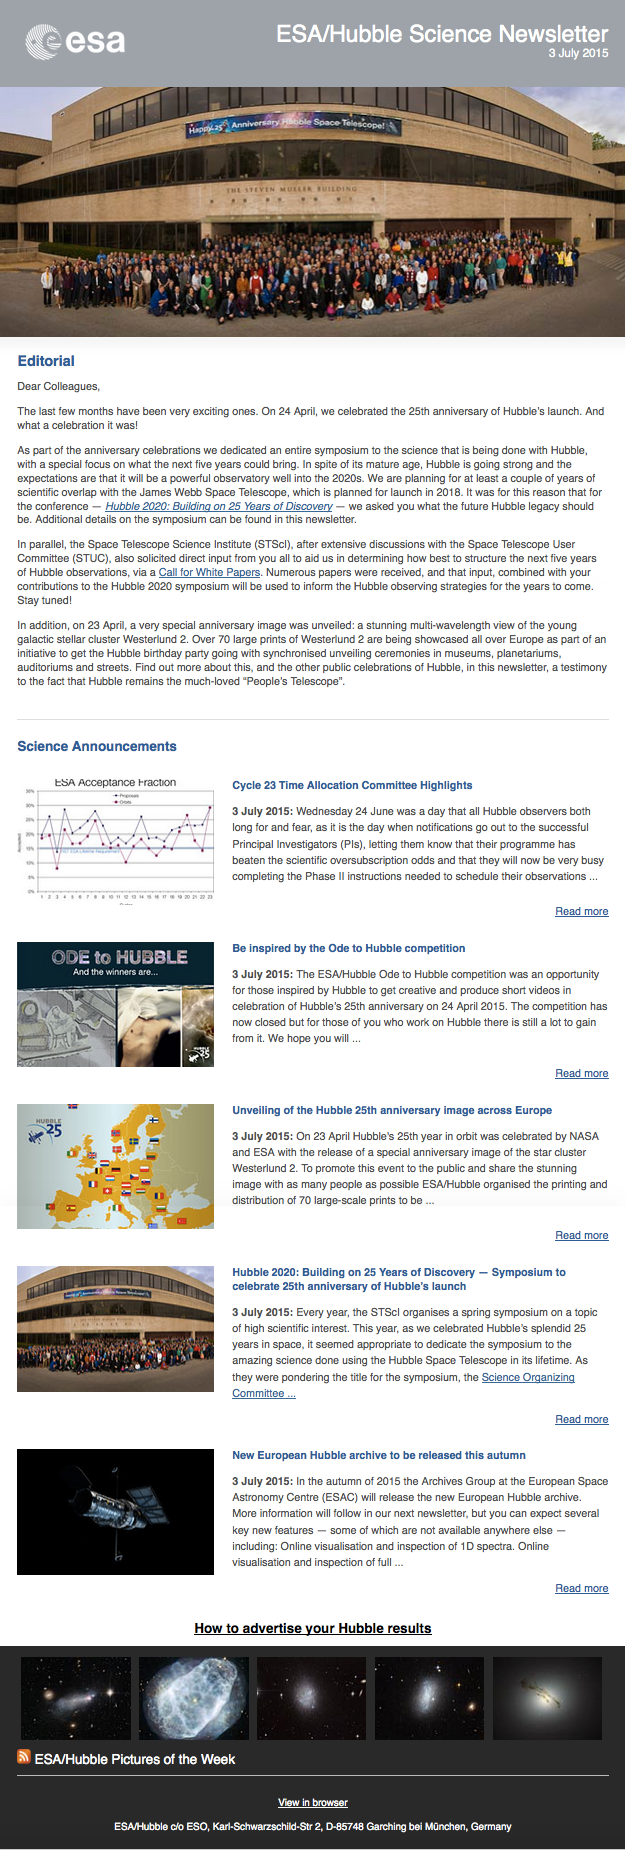

Screenshot of the June 2015 issue of ESA/Hubble Science Newsletter

Screenshot of the June 2015 issue of ESA/Hubble Science Newsletter.

Credit: NASA & ESA